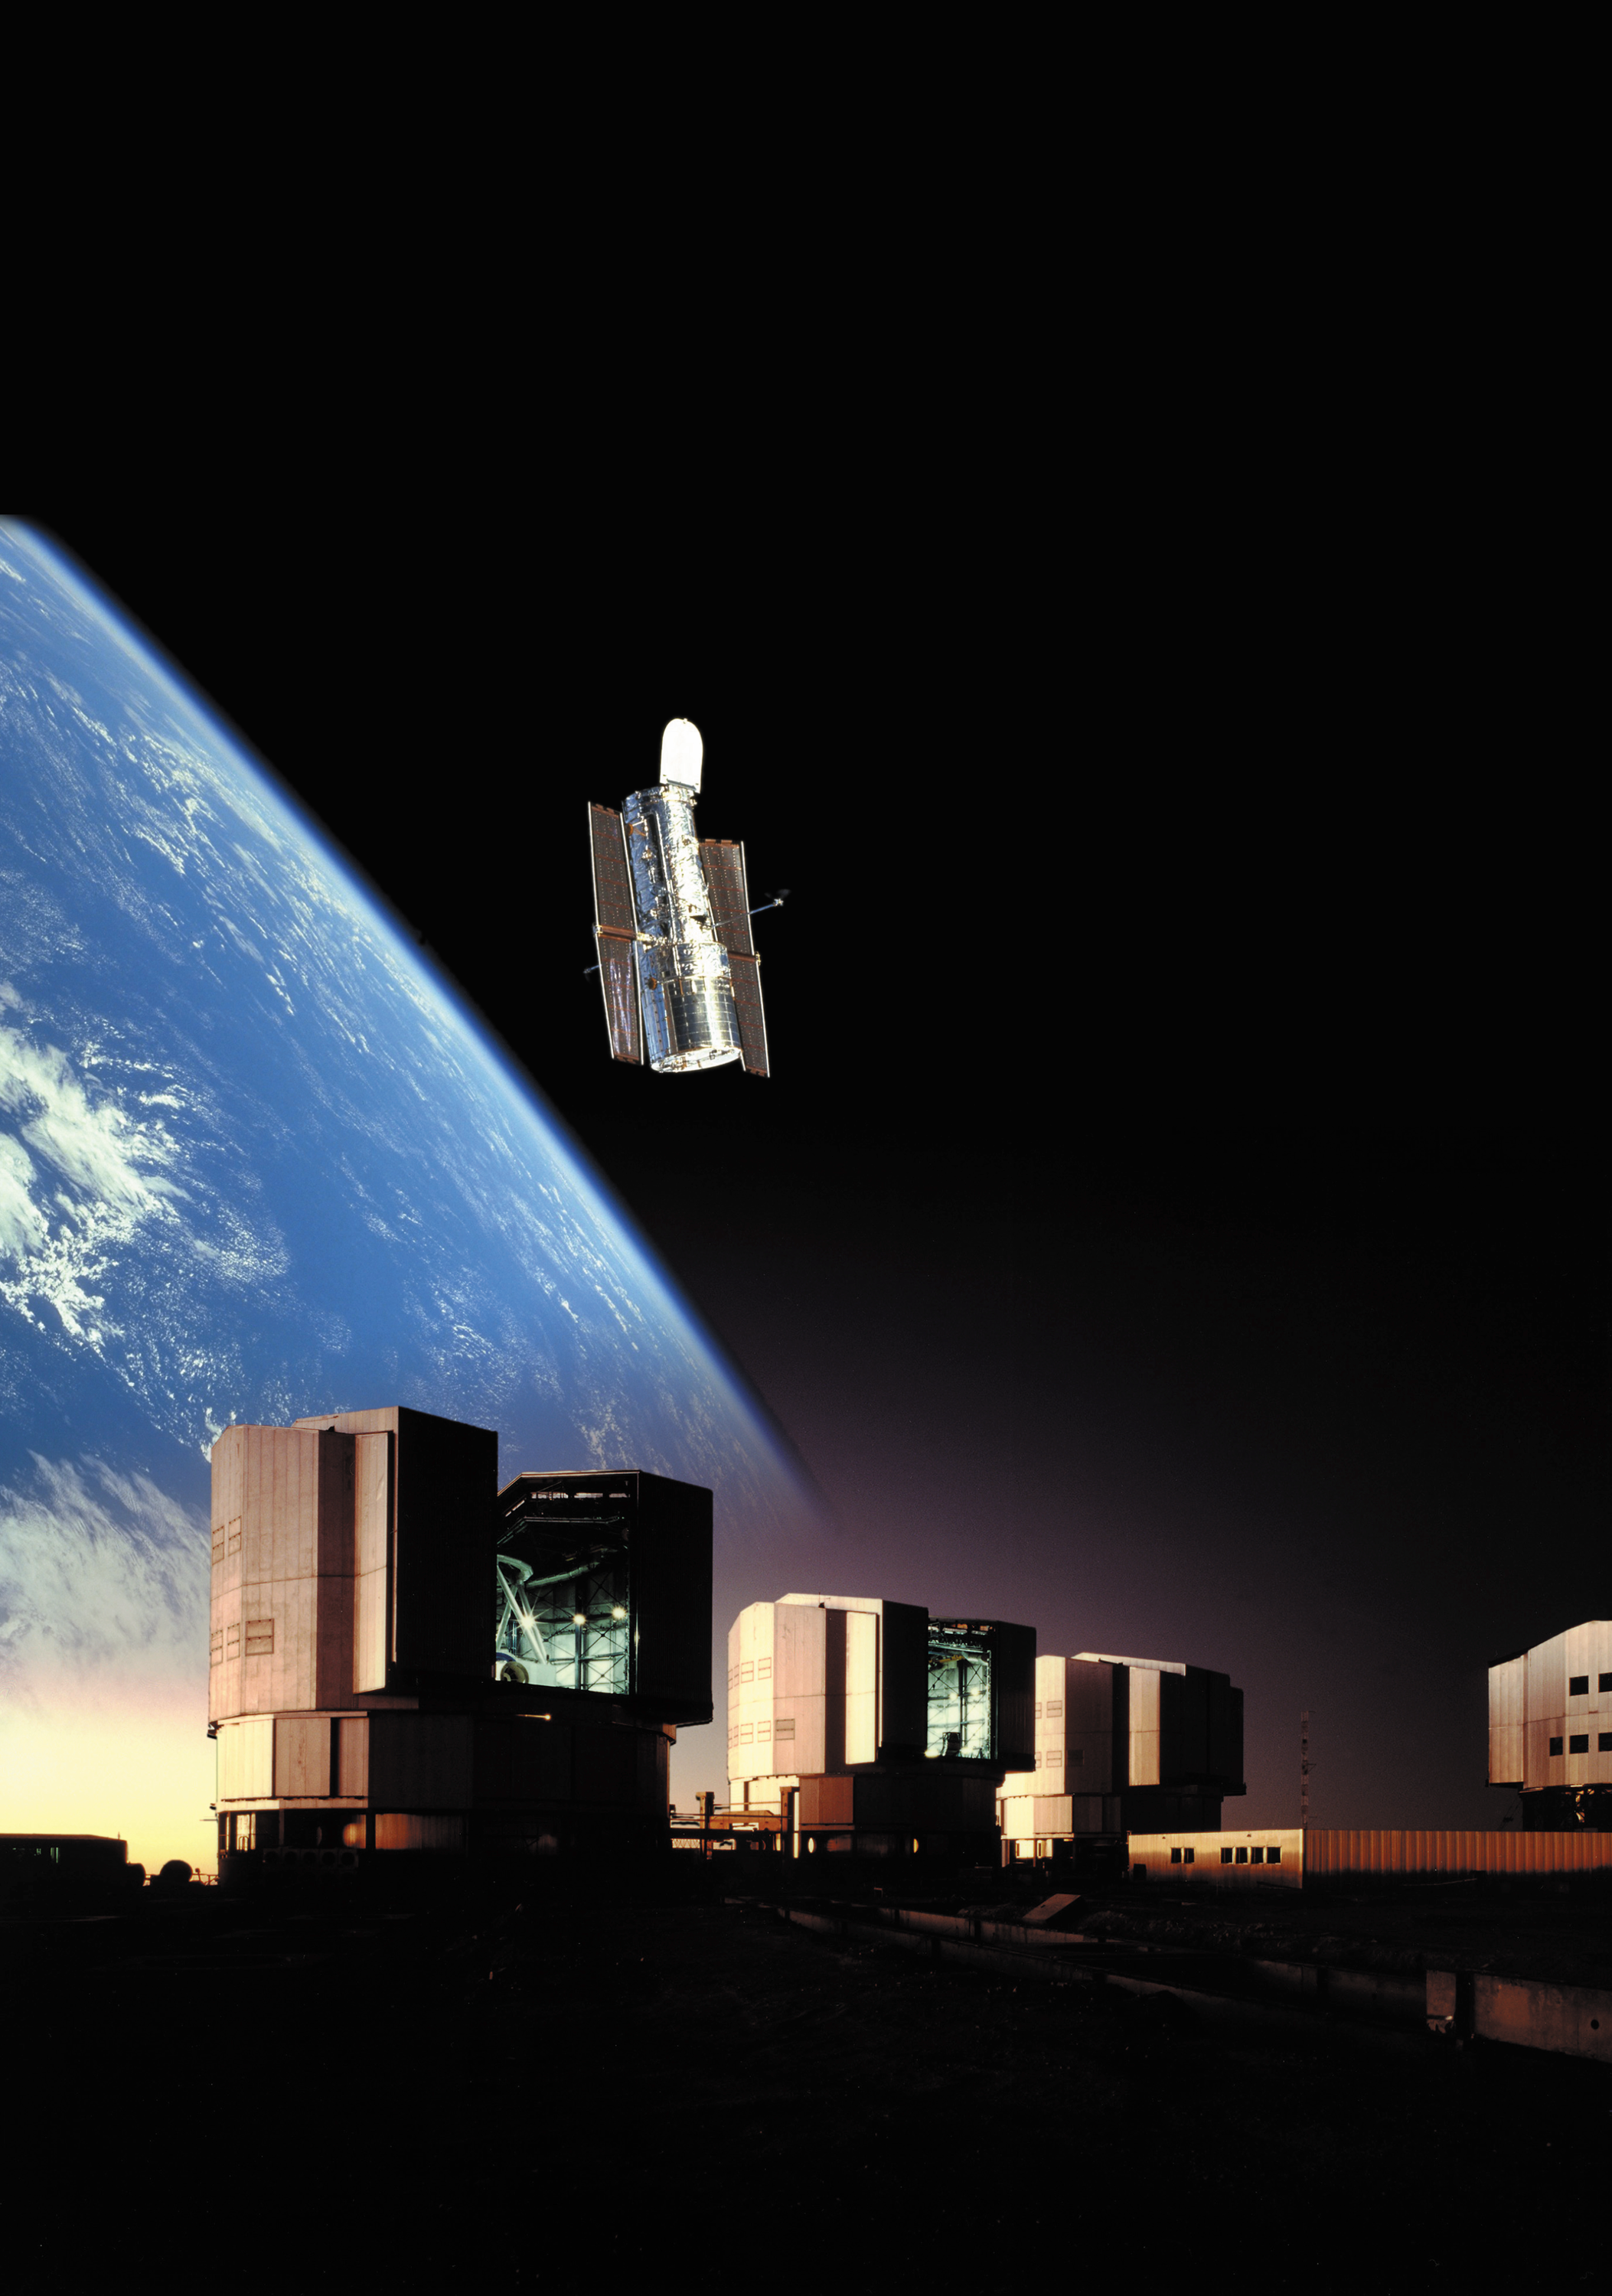

VLT and Hubble

Collage of the Hubble Space Telescope above the world's largest optical/infrared telescope, the Very Large Telescope (VLT).

Credit: ESO/ST-ECF